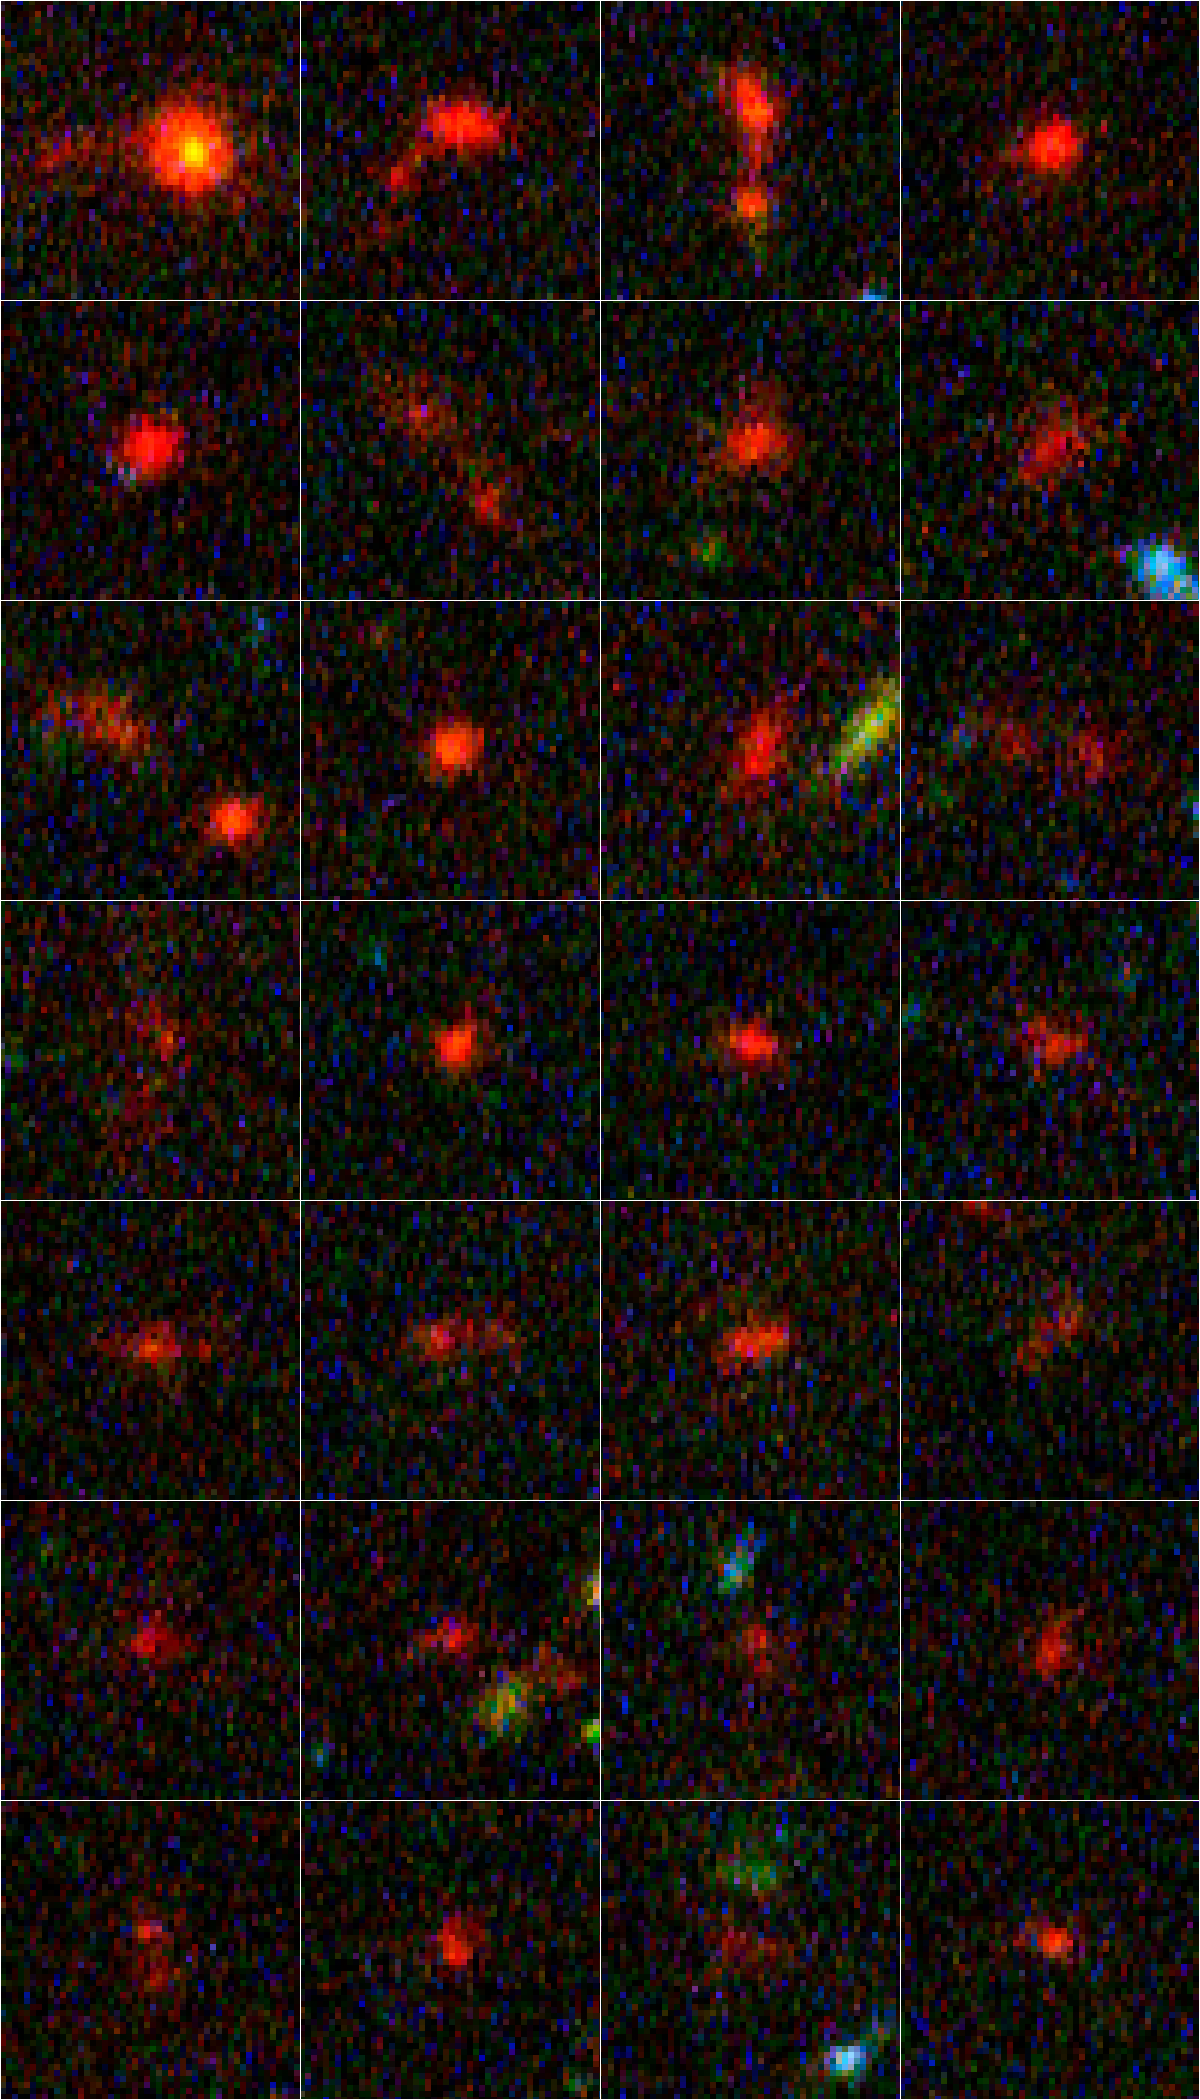

Details of individual distant galaxies

Astronomers analyzing two of the deepest views of the cosmos made with the NASA/ESA Hubble Space Telescope have uncovered a gold mine of galaxies, more than 500 that existed less than a billion years after the Big Bang. These galaxies thrived when the cosmos was less than 7 percent of its present age of 13.7 billion years. This sample, of which 28 are seen here, represents the most comprehensive compilation of galaxies in the early Universe, researchers said.

The galaxies appear red because of their tremendous distance from Earth. The blue light from their young stars took nearly 13 billion years to arrive at Earth. During the journey, the blue light was shifted to red light due to the expansion of space.

Credit: NASA, ESA, R. Bouwens and G. Illingworth (University of California, Santa Cruz, USA)